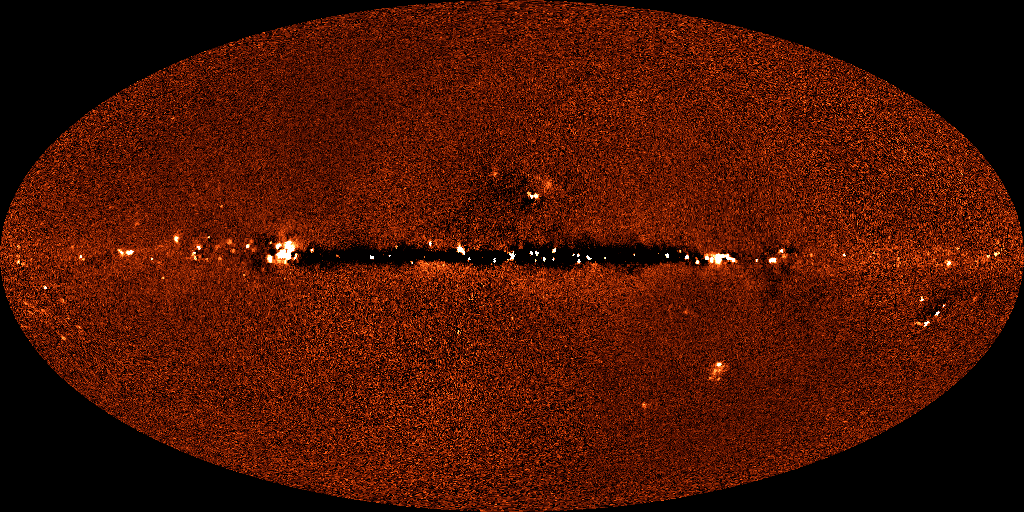

DIRBE 240 micrometer image of sky

Astronomers have assembled the first definitive detection of a background infrared glow across the sky produced by dust warmed by all the stars that have existed since the beginning of time. For scientists, the discovery of this "fossil radiation" is akin to turning out all the lights in a bedroom only to find the walls, floor, and ceiling aglow with an eerie luminescence.

Credit: Michael Hauser (STScI), the COBE/DIRBE Science Team, and NASA/ESA